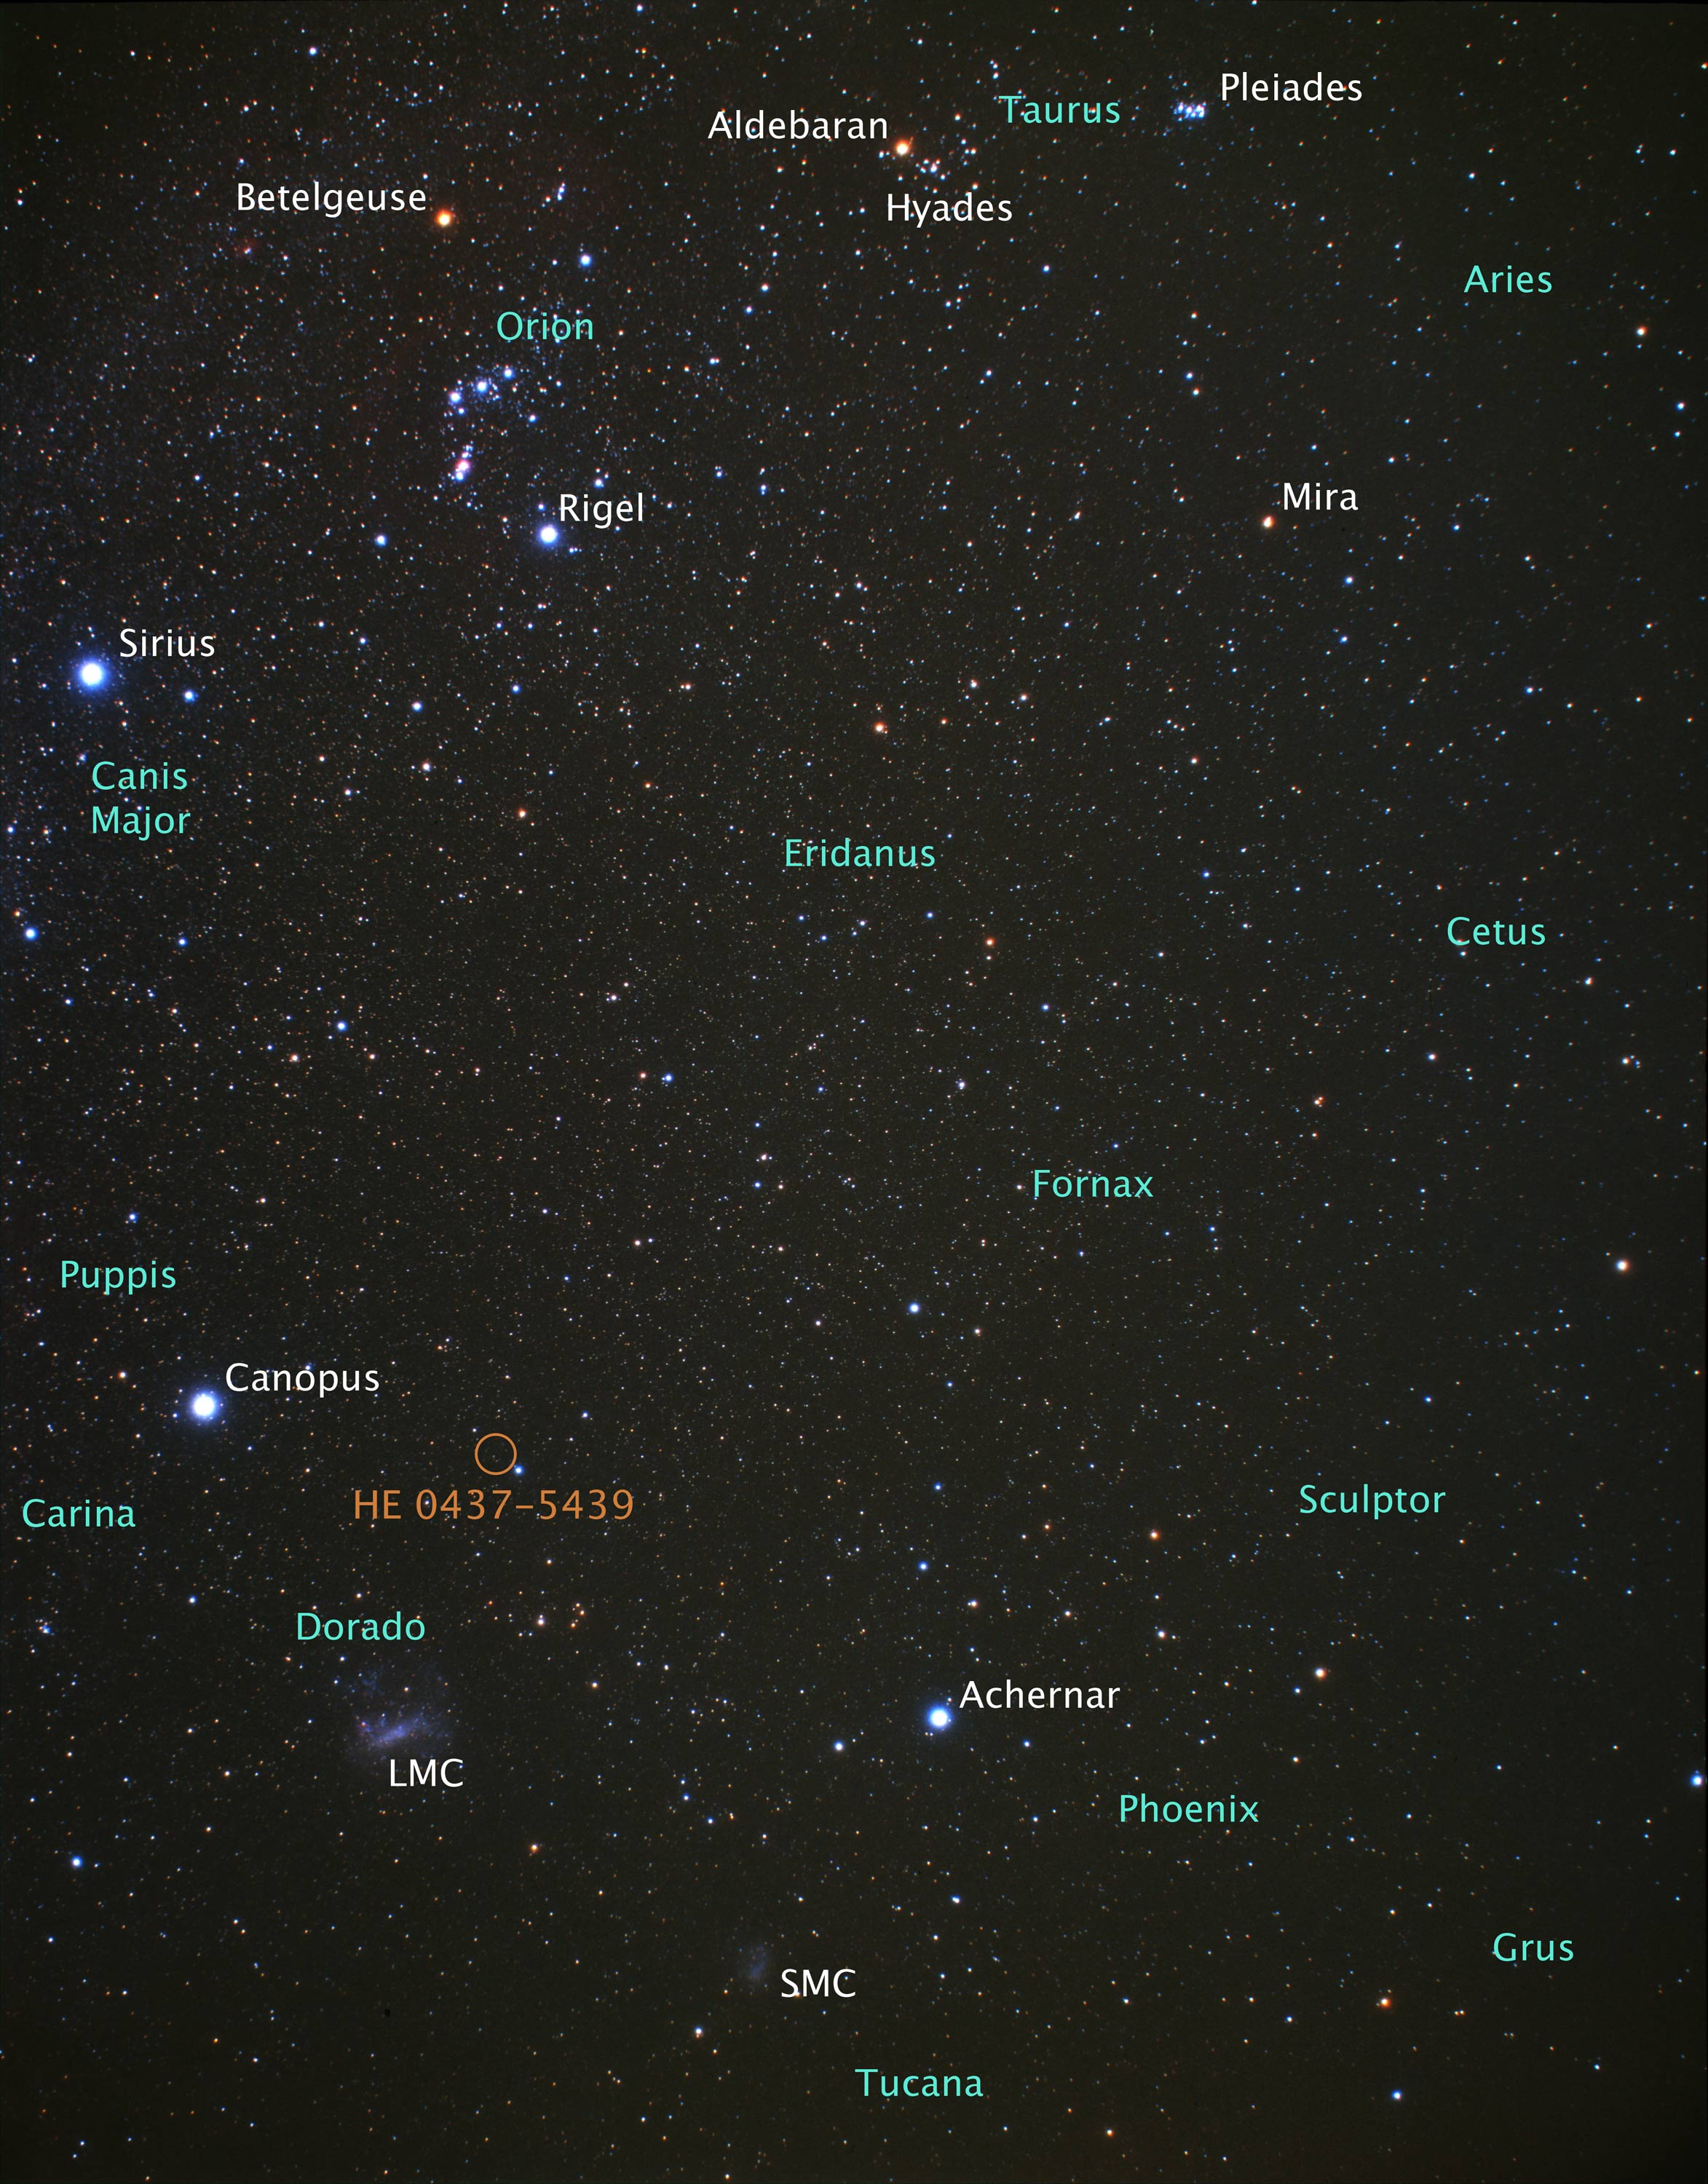

Location of hypervelocity star HE 0437-5439 (ground-based image)

Location of hypervelocity star HE 0437-5439.

Credit: NASA, ESA, and Z. Levay (STScI). Image Credit: NASA, ESA, and A. Fujii